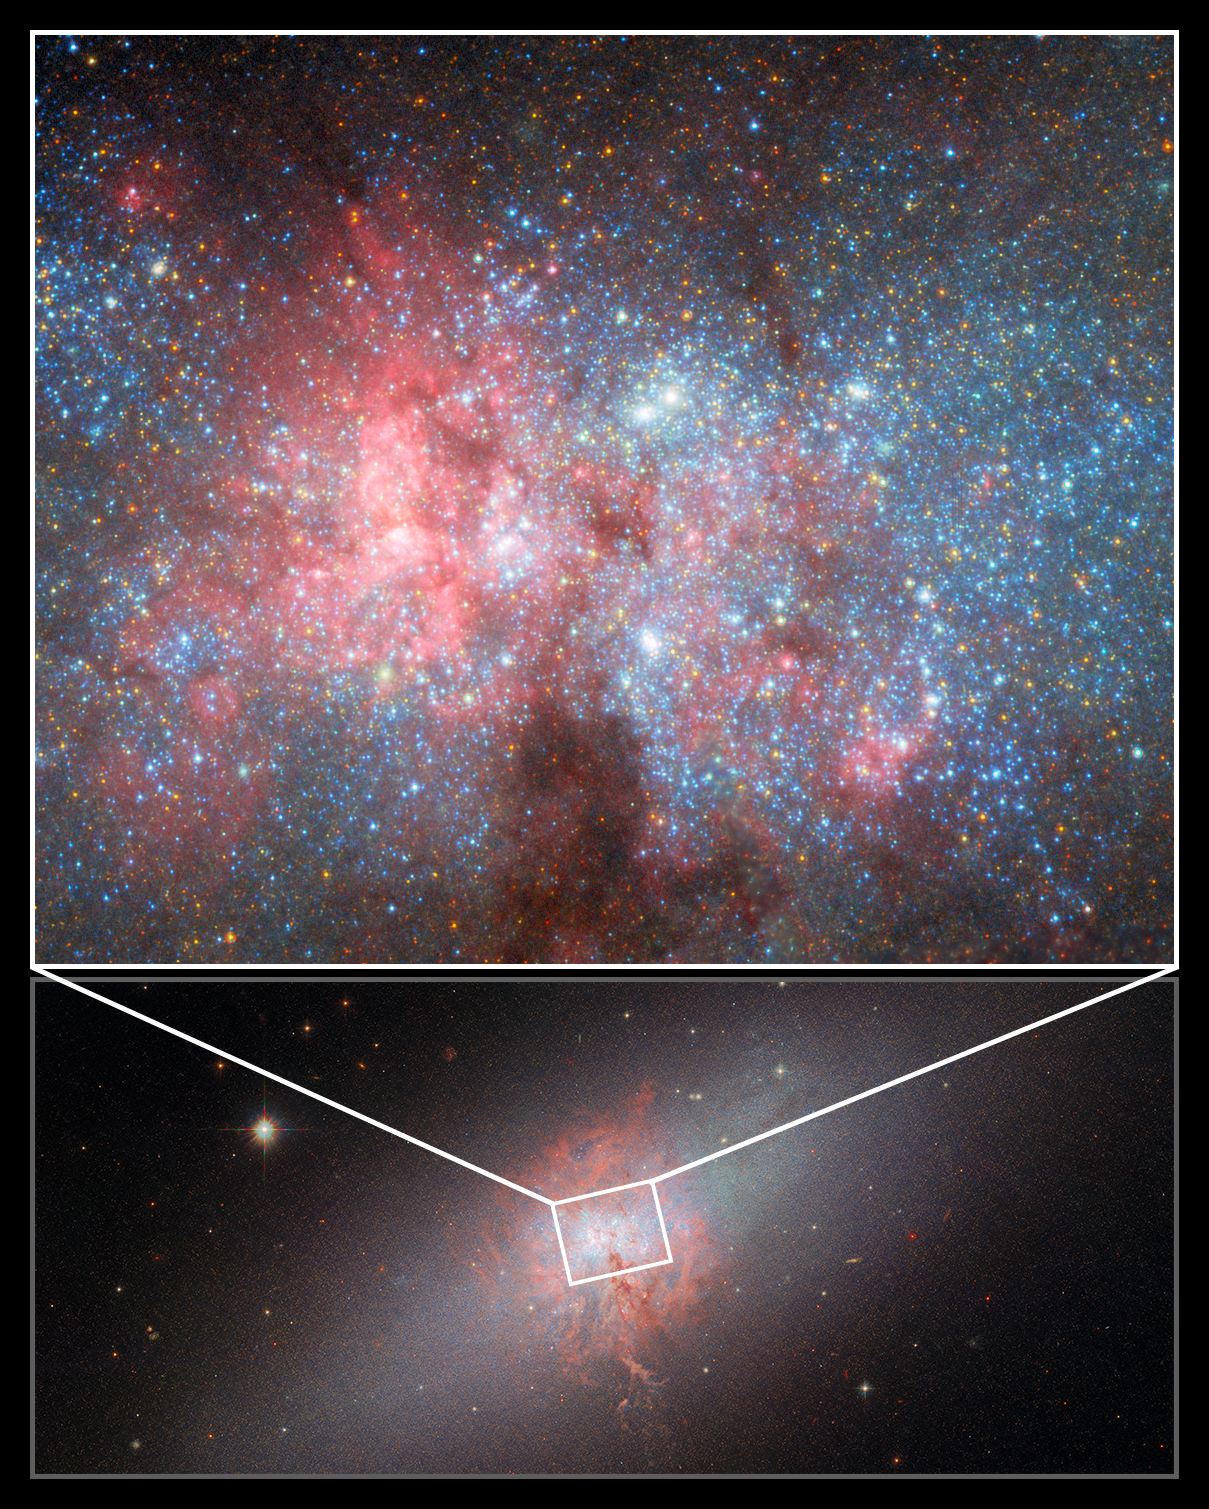

NGC 5253 (collage)

This picture from the NASA/ESA Hubble Space Telescope depicts the starburst galaxy NGC 5253, observed by two of Hubble’s instruments over a span of ten years.

At the bottom is a wide view of the galaxy, comprising data from Hubble’s Advanced Camera for Surveys (ACS) using the Wide Field Channel, and from the older Wide Field and Planetary Camera 2. Here the dense clouds of gas and dust in the galaxy are in full view, illuminated by bright and hot star clusters, at the centre of a vast array of stars. You can view this image in more detail here.

Above is a more detailed shot, obtained using the High Resolution Channel (HRC) of the ACS instrument. The pullout shows which region of the galaxy was captured by HRC. This focused image was used to study super star clusters in the dust-filled core of the galaxy. See the full image here.

Credit: ESA/Hubble & NASA, A. Zezas, W. D. Vacca, D. Calzetti